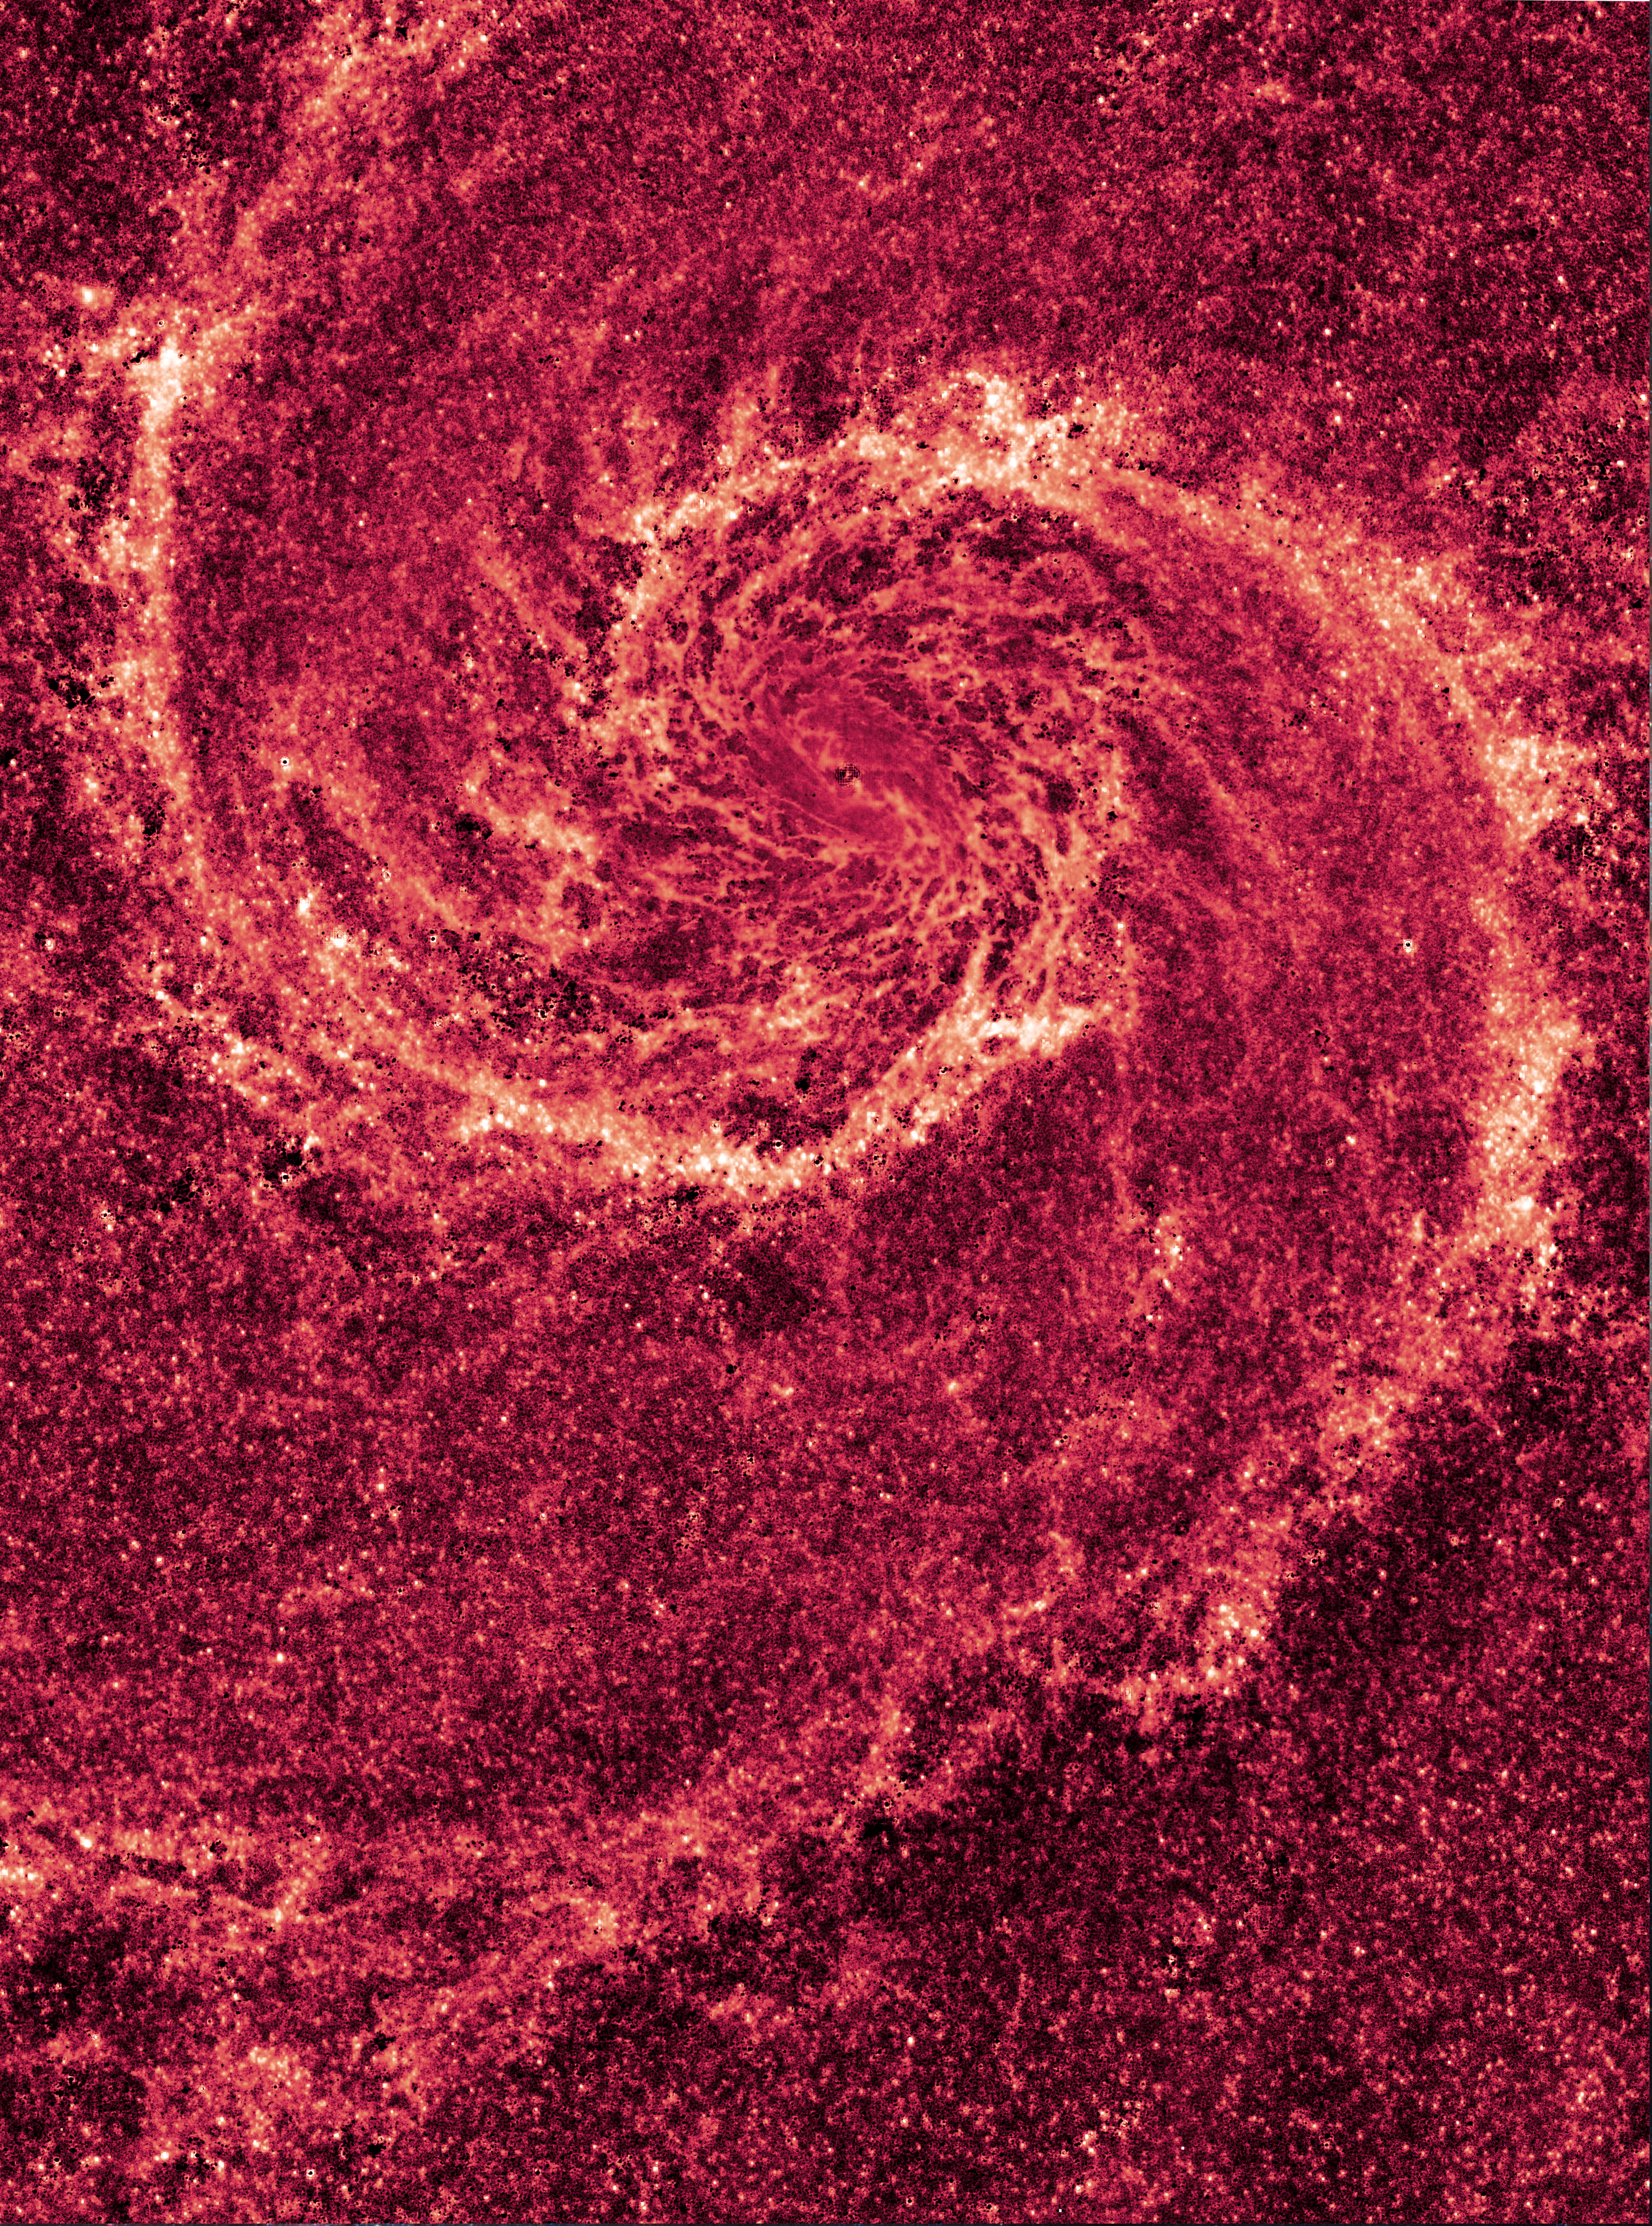

Hubble NICMOS infrared image of M51

This image by NASA's Hubble Space Telescope shows a face-on view of the spiral galaxy M51, dubbed the Whirlpool Galaxy.

Taken in infrared, the image reveals the Whirlpool's skeletal dust structure, as seen in near-infrared light. This new image is the sharpest view of the dense dust in M51. The narrow lanes of dust revealed by Hubble reflect the galaxy's name, the Whirlpool Galaxy, as they appear to swirl towards the galaxy's core.

Credit: NASA, ESA, M. Regan and B. Whitmore (STScI) and R. Chandar (University of Toledo, USA)